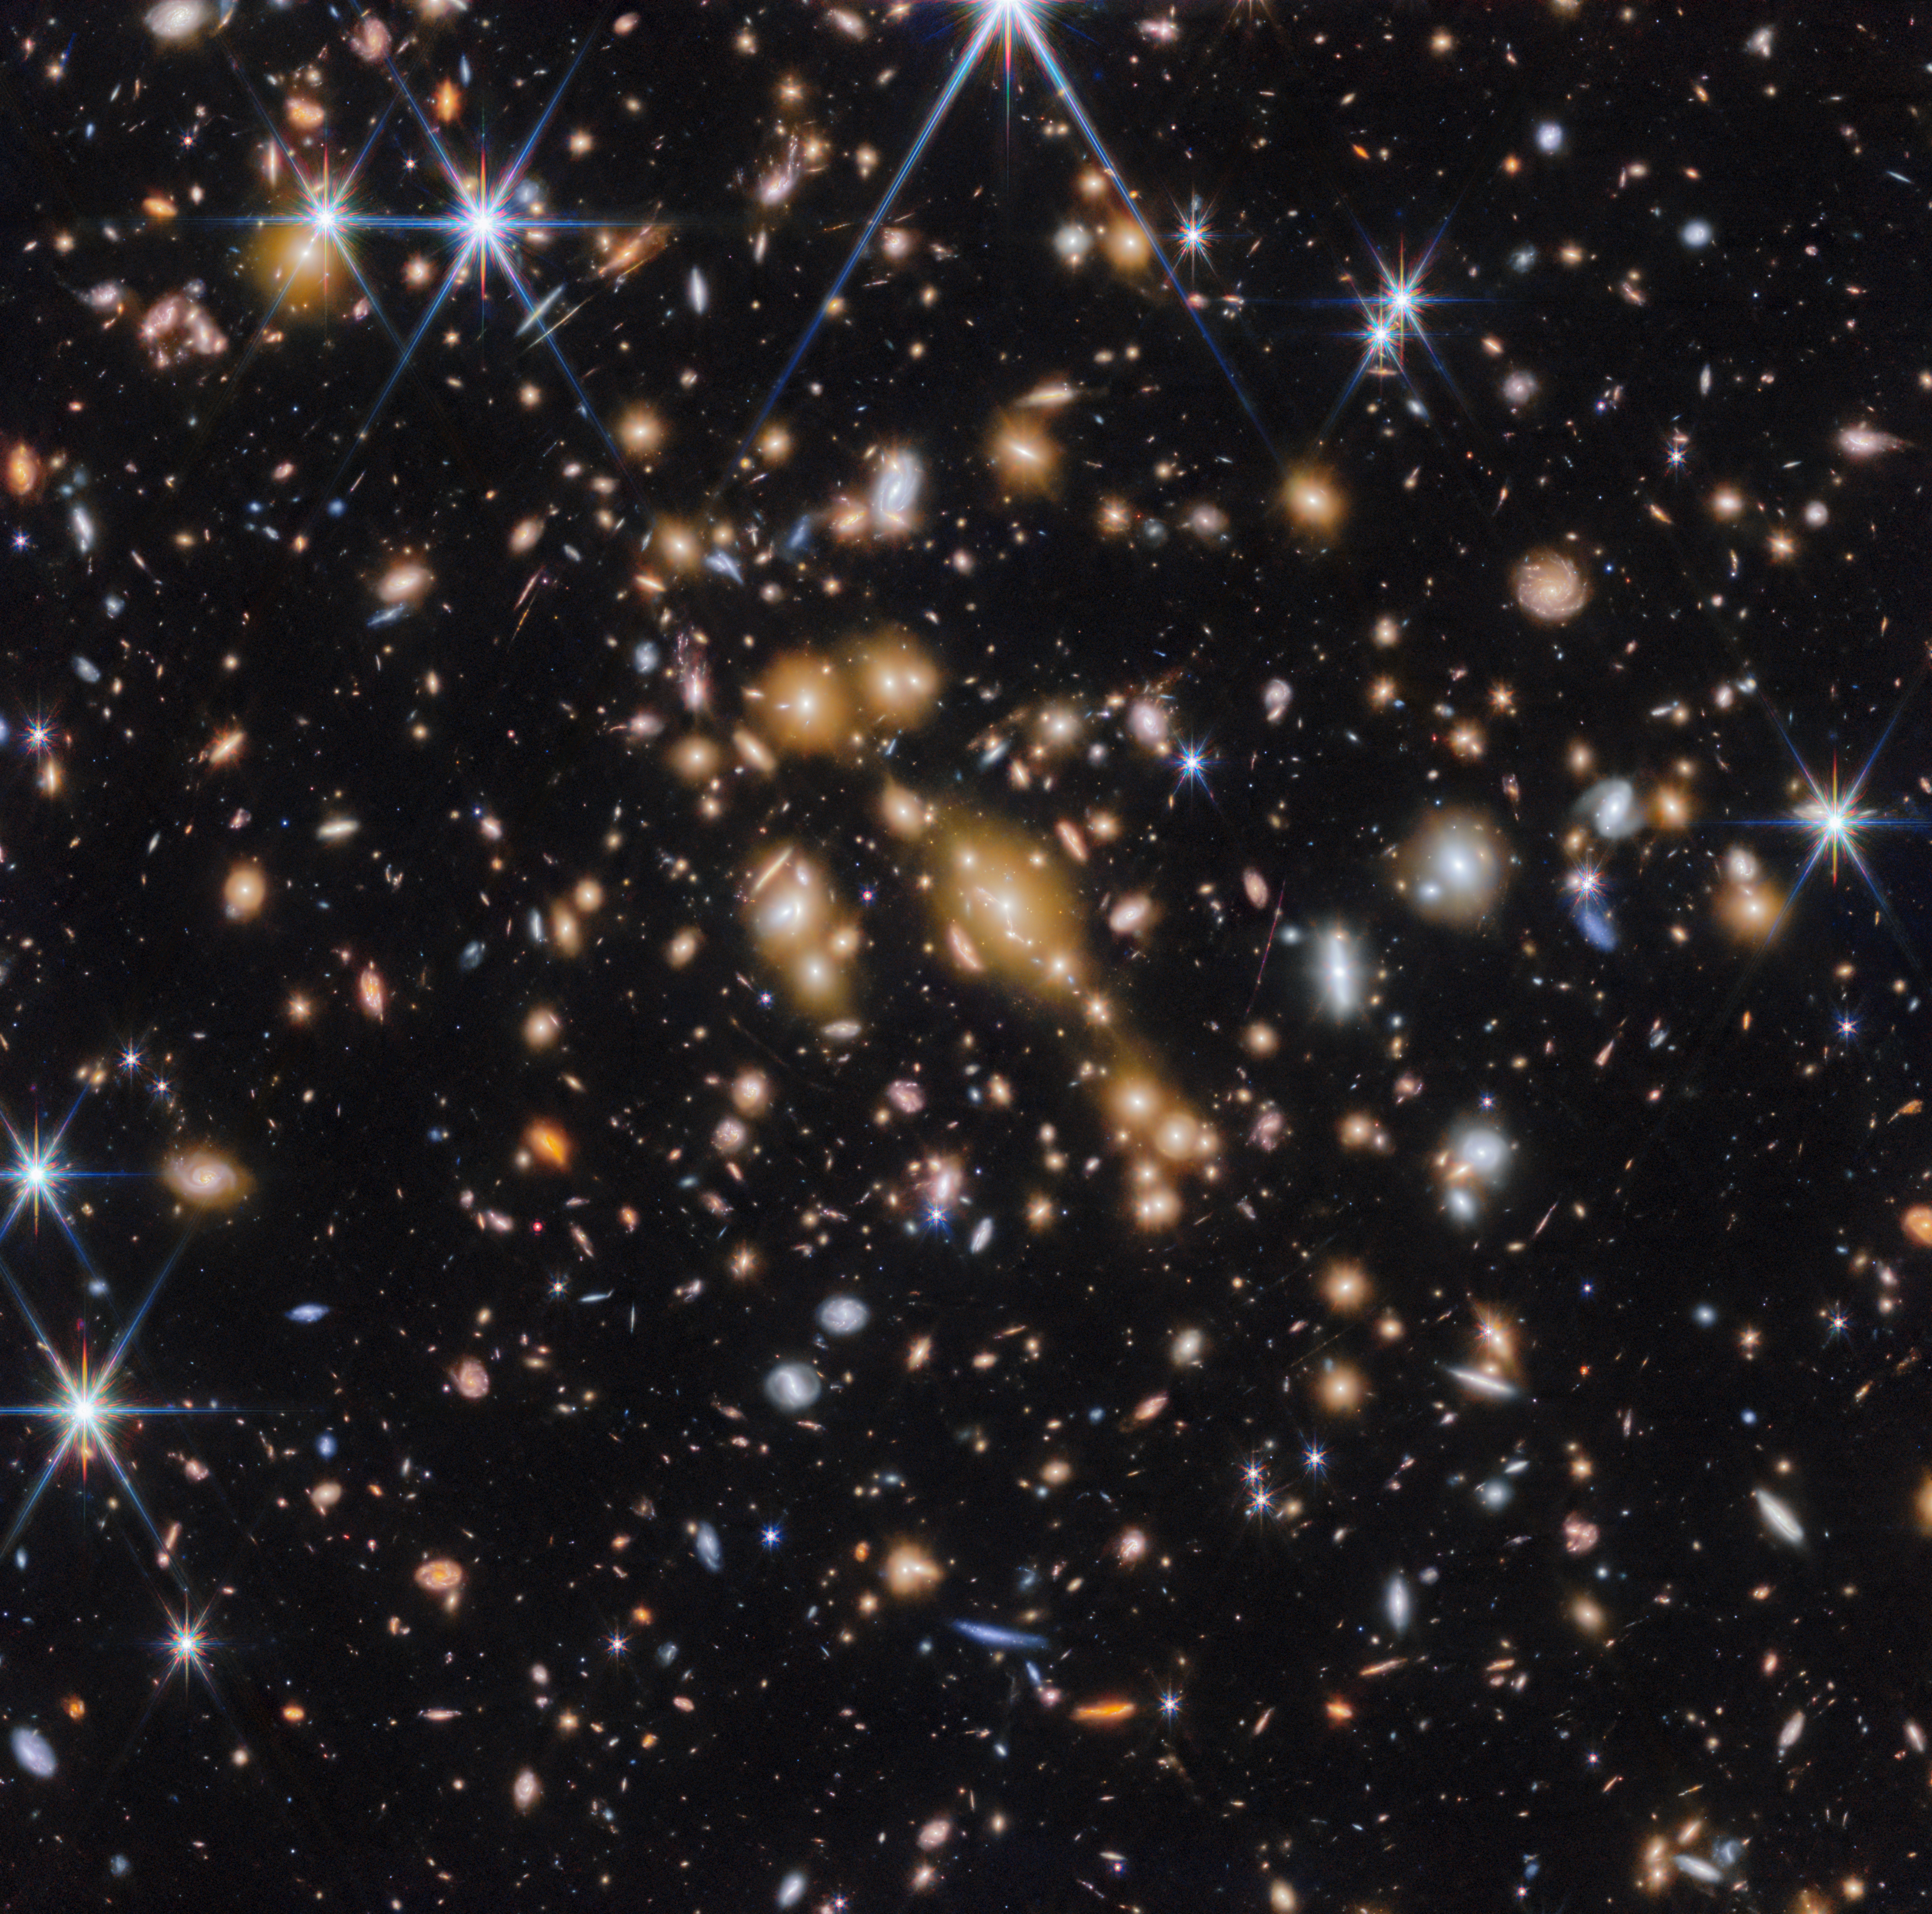

Galaxy cluster SPT-CL J0615−5746 (wide-field view)

An international team of astronomers have used the NASA/ESA/CSA James Webb Space Telescope to discover gravitationally bound star clusters when the Universe was 460 million years old. This is the first discovery of star clusters in an infant galaxy less than 500 million years after the Big bang.

Young galaxies in the early Universe underwent significant burst phases of star formation, generating substantial amounts of ionising radiation. However, because of their cosmological distances, direct studies of their stellar content have proven challenging. Using Webb, an international team of astronomers have now detected five young massive star clusters in the Cosmic Gems arc (SPT0615-JD1), a strongly-lensed galaxy emitting light when the Universe was roughly 460 million years old, looking back across 97% of cosmic time.

The Cosmic Gems arc was initially discovered in NASA/ESA Hubble Space Telescope images obtained by the RELICS (Reionization Lensing Cluster Survey) programme of the lensing galaxy cluster SPT-CL J0615−5746.

With Webb, the science team can now see where stars formed and how they are distributed, in a similar way to how the Hubble Space Telescope is used to study local galaxies. Webb’s view provides a unique opportunity to study star formation and the inner workings of infant galaxies at such an unprecedented distance.

Credit: ESA/Webb, NASA & CSA, L. Bradley (STScI), A. Adamo (Stockholm University) and the Cosmic Spring collaboration